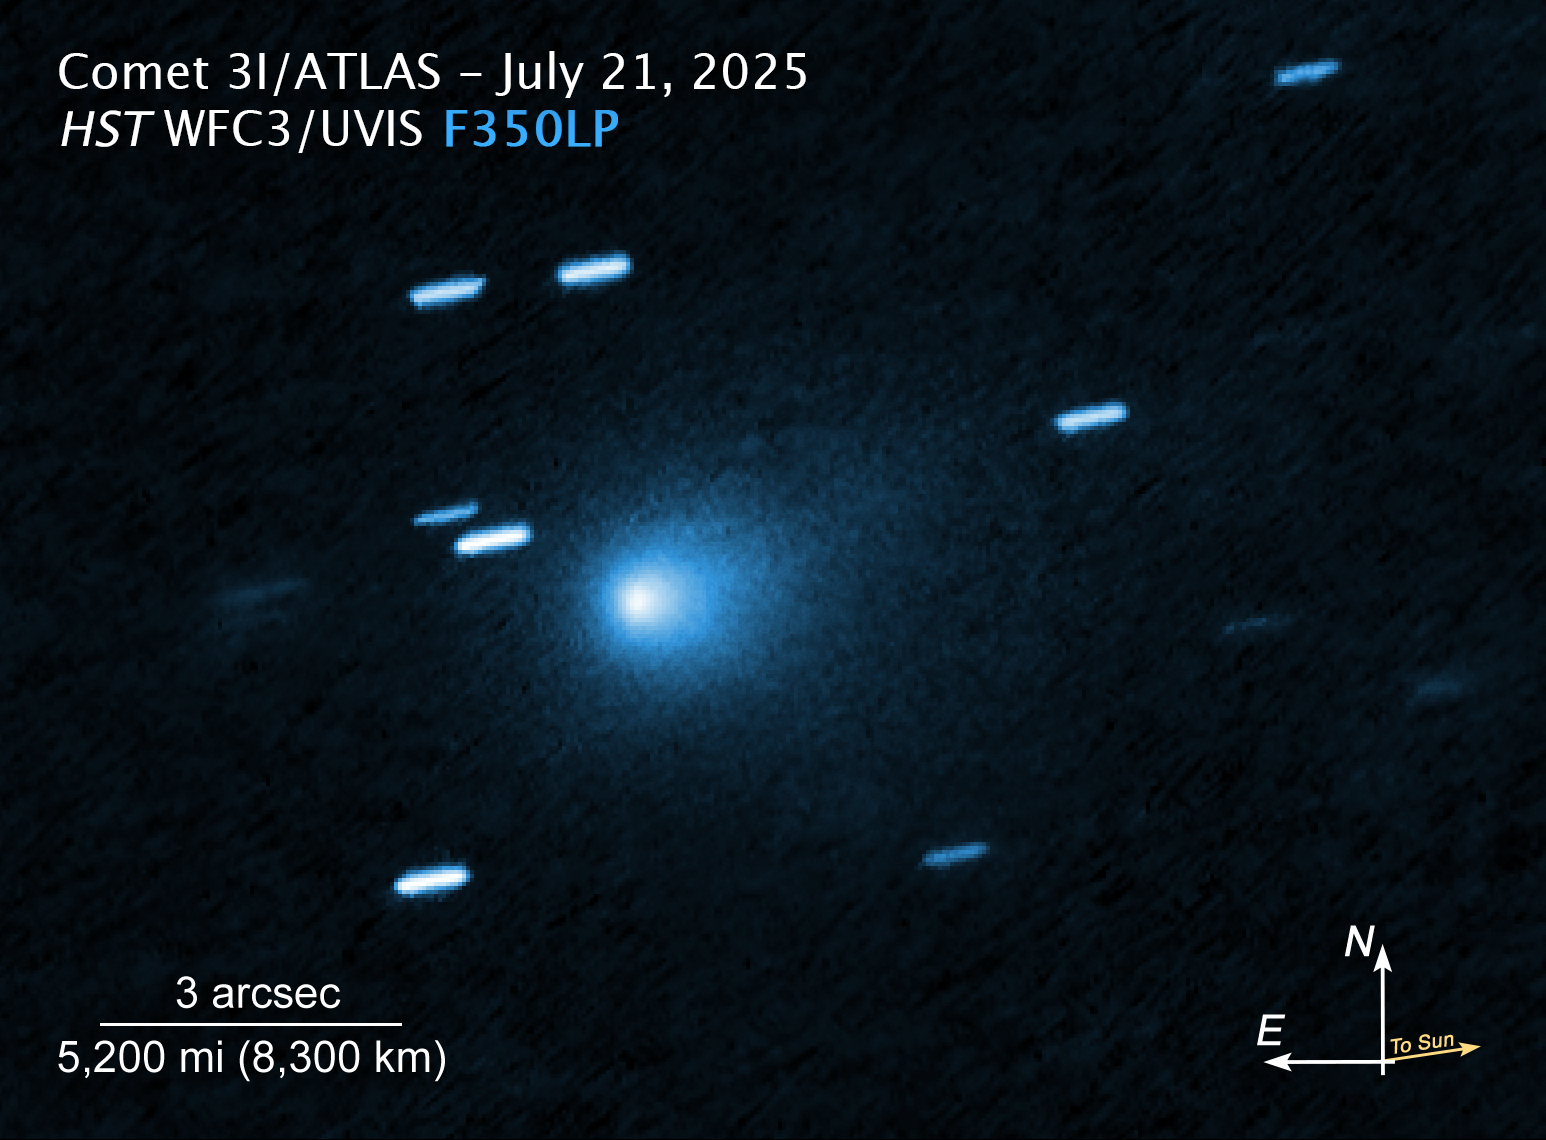

3I/ATLAS (annotated)

This image of interstellar comet 3I/ATLAS was captured by the Hubble Space Telescope’s Wide Field Camera on 21 July 2025.

The scale bar is labeled in arcseconds, which is a measure of angular distance on the sky. One arcsecond is equal to an angular measurement of 1/3600 of one degree. There are 60 arcminutes in a degree and 60 arcseconds in an arcminute (the full Moon has an angular diameter of about 30 arcminutes). The actual size of an object that covers one arcsecond on the sky depends on its distance from the telescope.

The north and east compass arrows show the orientation of the image on the sky. Note that the relationship between north and east on the sky (as seen from below) is flipped relative to direction arrows on a map of the ground (as seen from above).

This image shows visible wavelengths of light.

Credit: NASA, ESA, D. Jewitt (UCLA); Image Processing: J. DePasquale (STScI)